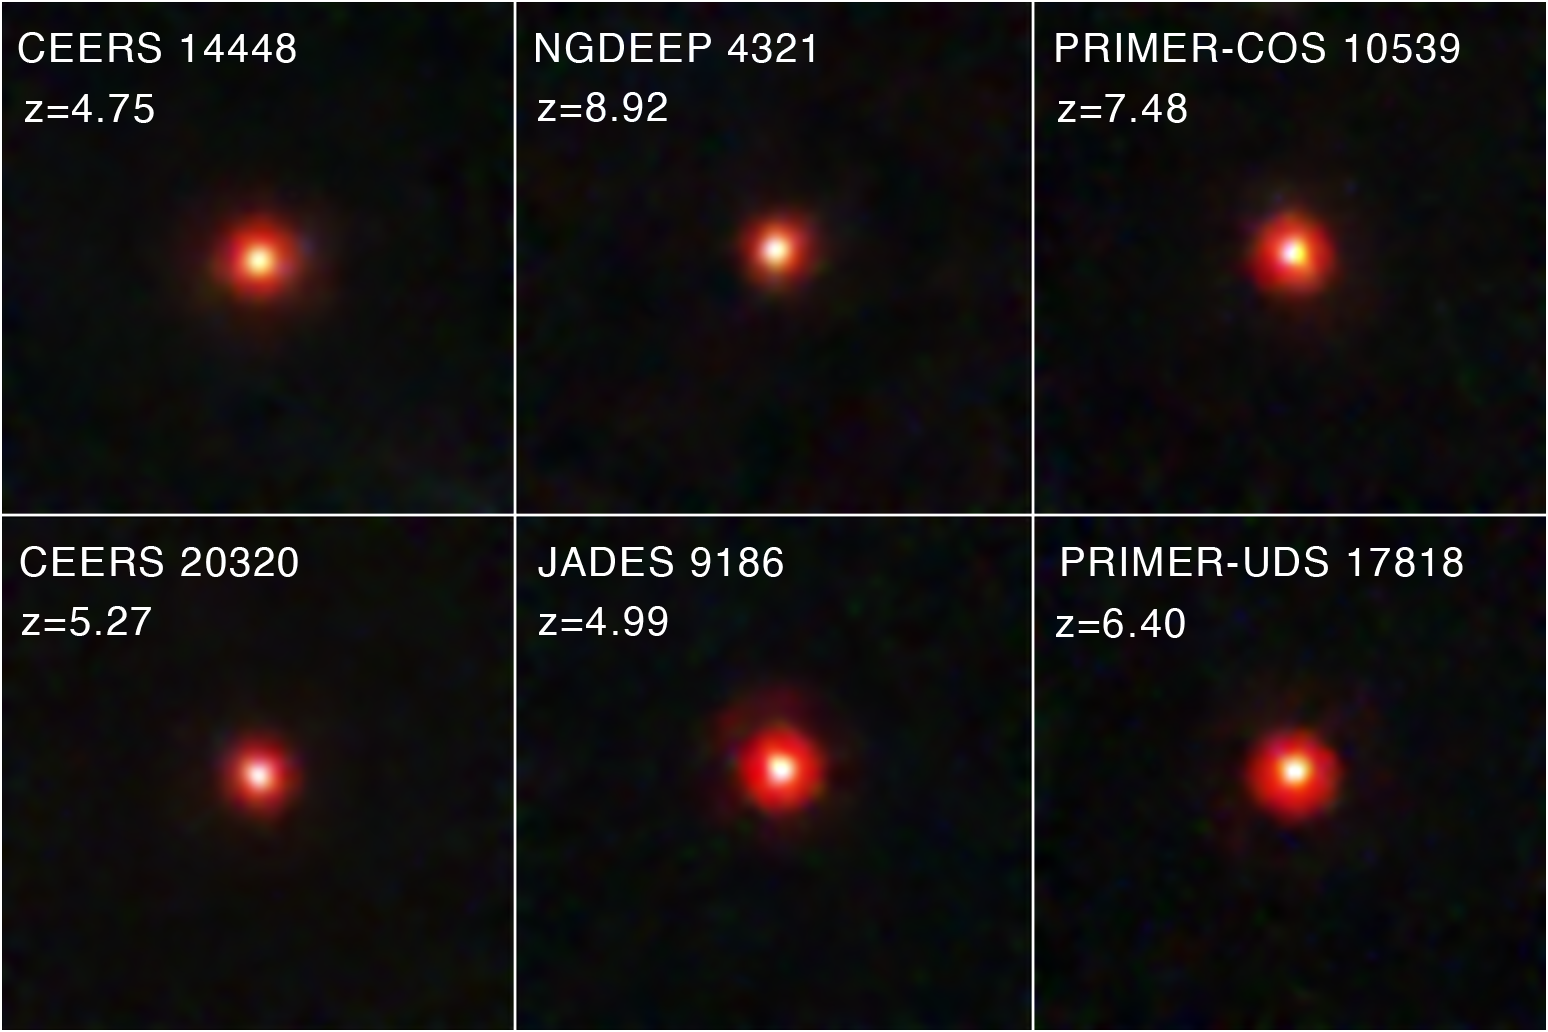

Little Red Dots (NIRCam Image)

Soon after the start of the NASA/ESA/CSA James Webb Space Telescope’s science operations, astronomers noticed something unexpected in the data: red objects that appear small on the sky, located in the distant, young universe. Come to be known as “little red dots” (LRDs), this intriguing class of objects is not well understood at present, sparking new questions and prompting new theories about the processes that occurred in the early universe.

A team of astronomers sifted through James Webb Space Telescope data from multiple surveys to compile one of the largest samples of “little red dots” (LRDs) to date. The team started with the Cosmic Evolution Early Release Science (CEERS) survey before widening their scope to other extragalactic legacy fields, including the JWST Advanced Deep Extragalactic Survey (JADES) and the Next Generation Deep Extragalactic Exploratory Public (NGDEEP) survey.

From their sample, they found that these mysterious red objects that appear small on the sky emerge in large numbers around 600 million years after the big bang and undergo a rapid decline in quantity around 1.5 billion years after the big bang. Spectroscopic data of some of the LRDs in their sample, provided by the Red Unknowns: Bright Infrared Extragalactic Survey (RUBIES), suggests that many are accreting black holes. However, further study of these intriguing objects is required.

Credit: NASA, ESA, CSA, STScI, D. Kocevski (Colby College)